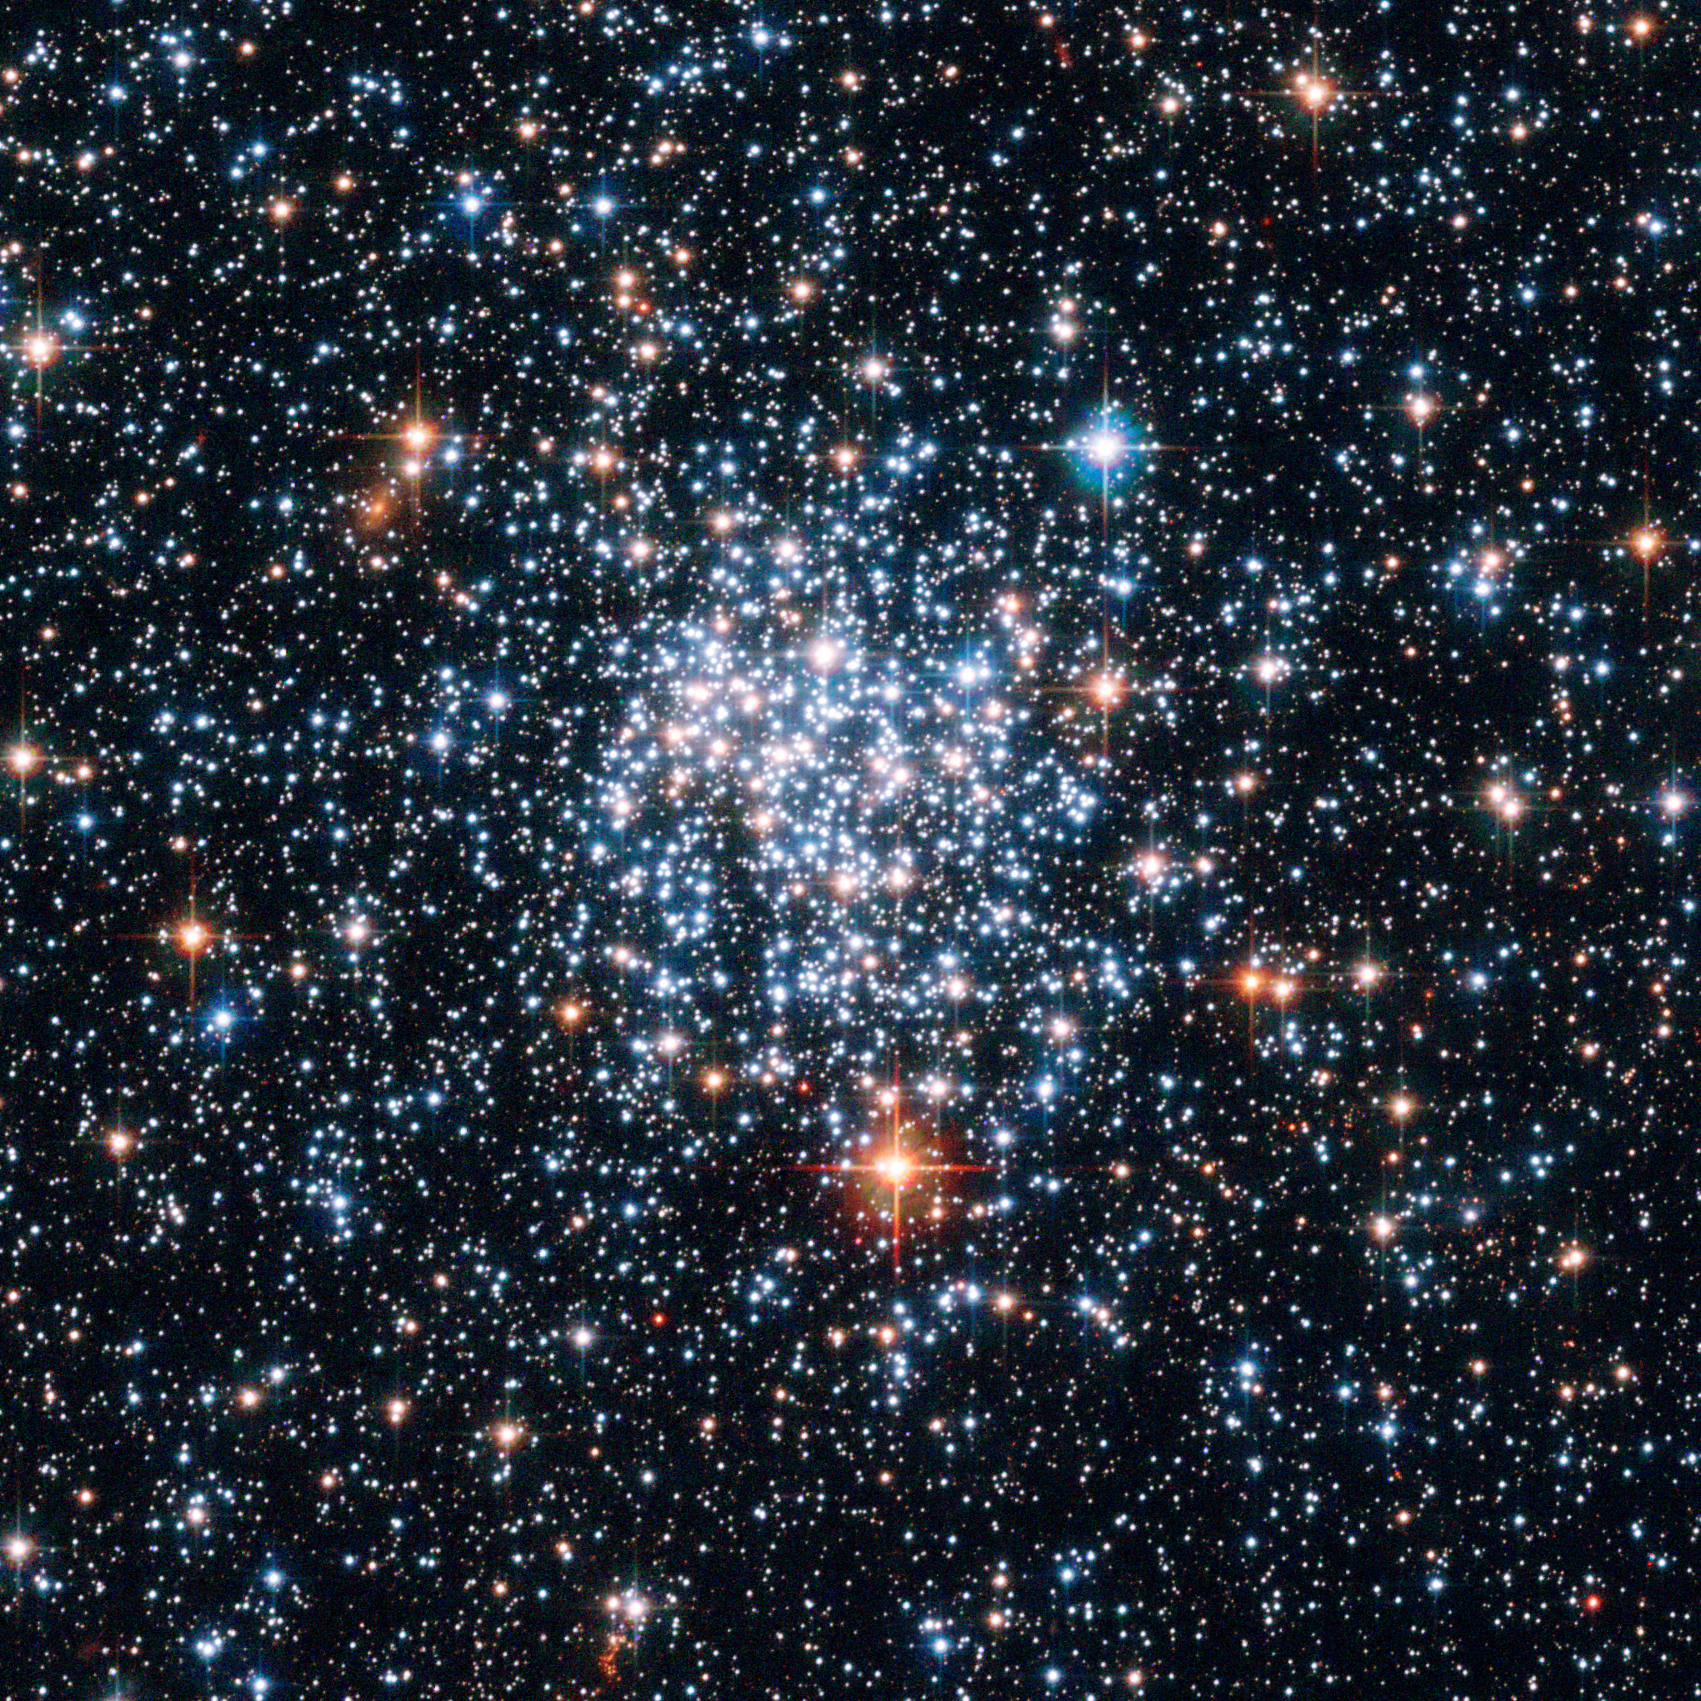

Magellanic gemstone in the southern sky [NGC 265]

Hubble has captured the most detailed image to date of the open star cluster NGC 265 in the Small Magellanic Cloud.

The image taken with the Advanced Camera for Surveys onboard the NASA/ESA Hubble Space Telescope show a myriad of stars in crystal clear detail. The brilliant open star cluster, NGC 265, is located about 200,000 light-years away and is roughly 65 light-years across.

Credit: European Space Agency & NASA
Acknowledgements: Davide De Martin (ESA/Hubble) and Edward W. Olszewski (University of Arizona, USA)